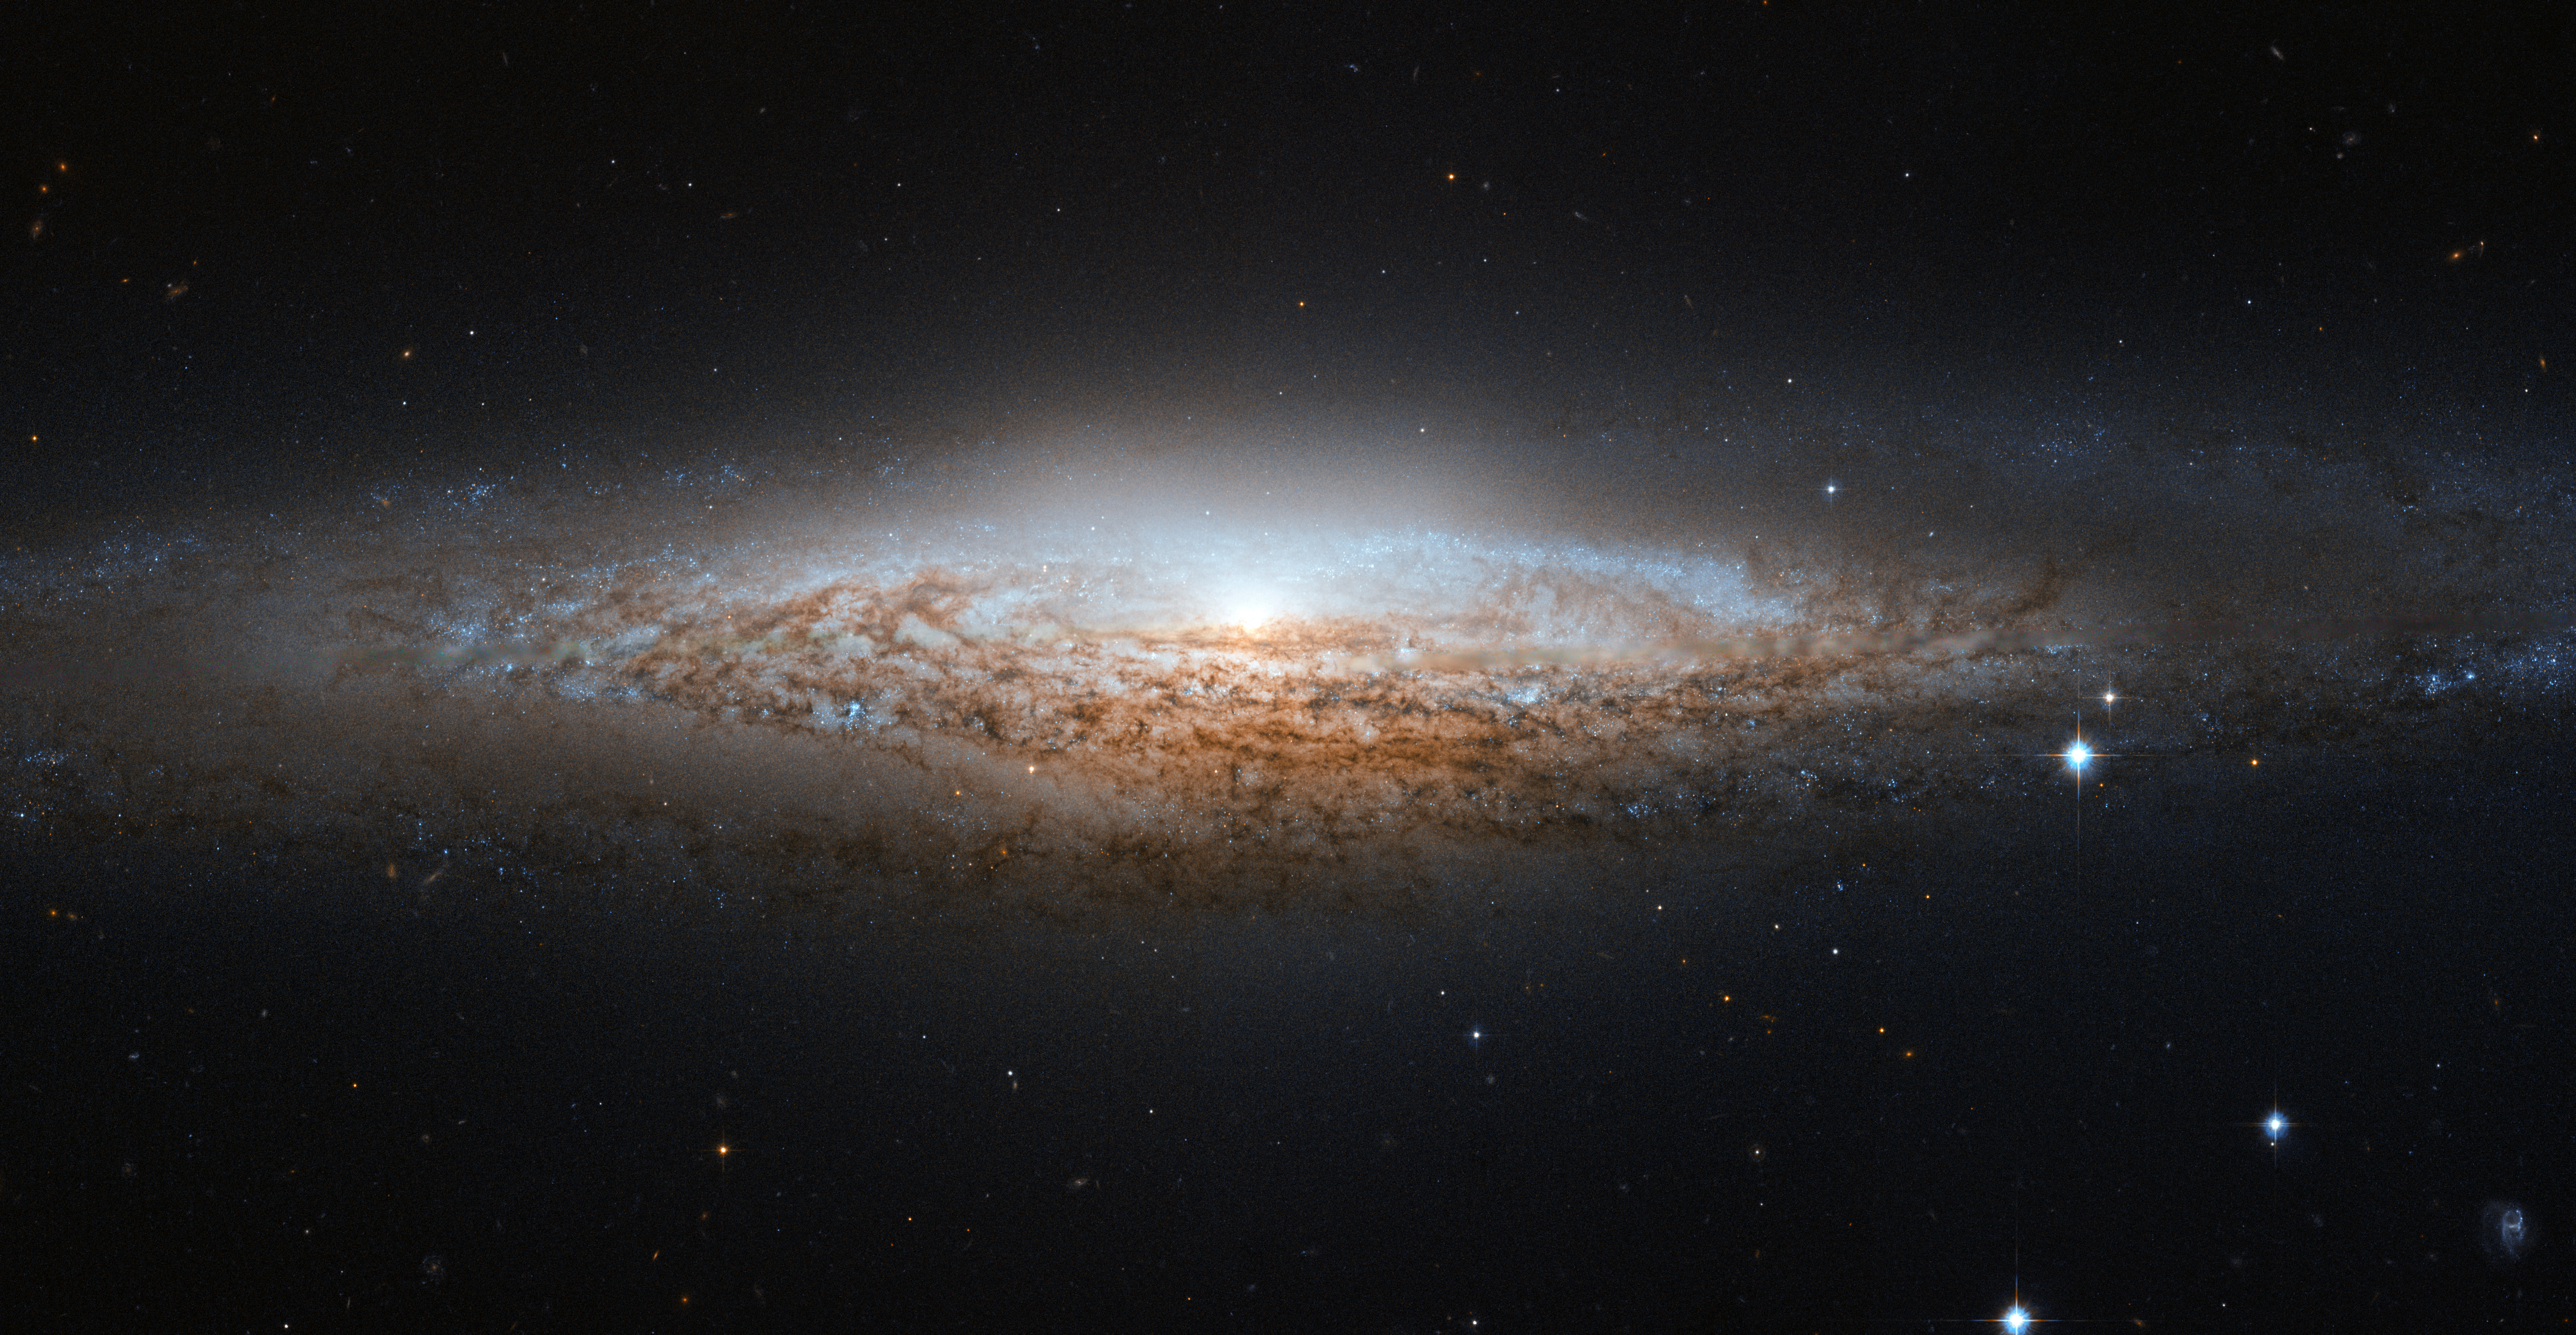

Hubble spies a UFO

The NASA/ESA Hubble Space Telescope has spotted a UFO — well, the UFO Galaxy, to be precise. NGC 2683 is a spiral galaxy seen almost edge-on, giving it the shape of a classic science fiction spaceship. This is why the astronomers at the Astronaut Memorial Planetarium and Observatory gave it this attention-grabbing nickname.

While a bird’s eye view lets us see the detailed structure of a galaxy (such as this Hubble image of a barred spiral), a side-on view has its own perks. In particular, it gives astronomers a great opportunity to see the delicate dusty lanes of the spiral arms silhouetted against the golden haze of the galaxy’s core. In addition, brilliant clusters of young blue stars shine scattered throughout the disc, mapping the galaxy’s star-forming regions.

Perhaps surprisingly, side-on views of galaxies like this one do not prevent astronomers from deducing their structures. Studies of the properties of the light coming from NGC 2683 suggest that this is a barred spiral galaxy, even though the angle we see it at does not let us see this directly.

NGC 2683, discovered on 5 February 1788 by the famous astronomer William Herschel, lies in the Northern constellation of Lynx. A constellation named not because of its resemblance to the feline animal, but because it is fairly faint, requiring the “sensitive eyes of a cat” to discern it. And when you manage to get a look at it, you’ll find treasures like this, making it well worth the effort.

This image is produced from two adjacent fields observed in visible and infrared light by Hubble’s Advanced Camera for Surveys. A narrow strip which appears slightly blurred and crosses most the image horizontally is a result of a gap between Hubble’s detectors. This strip has been patched using images from observations of the galaxy made by ground-based telescopes, which show significantly less detail.

The field of view is approximately 6.5 by 3.3 arcminutes.

Credit: ESA/Hubble & NASA